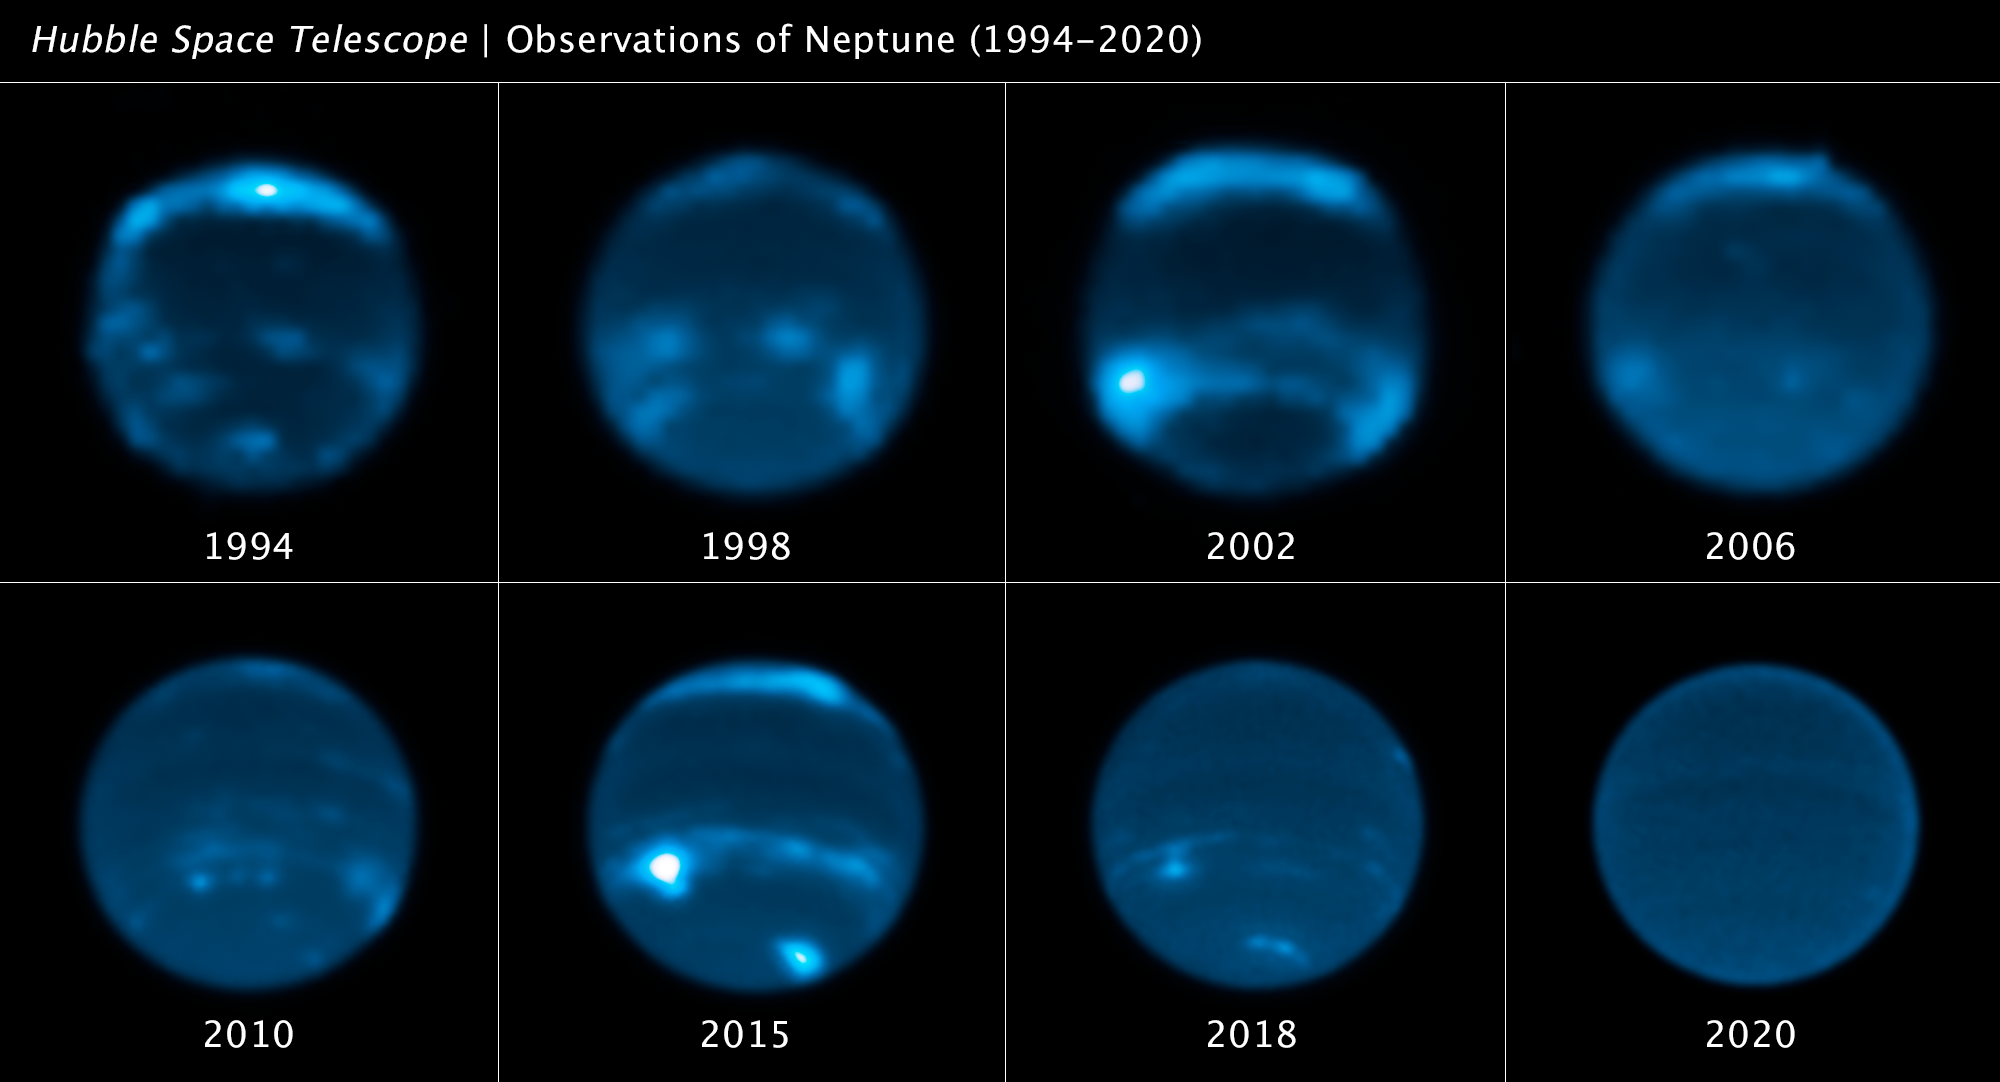

Neptune cloud cover over three decades

This sequence of NASA/ESA Hubble Space Telescope images chronicles the waxing and waning of the amount of cloud cover on Neptune. This long set of observations shows that the number of clouds grows increasingly following a peak in the solar cycle – where the Sun’s level of activity rhythmically rises and falls over an 11-year period.

The theory is that the increased ultraviolet radiation from the Sun, during its peak of activity, causes chemical changes deep in Neptune’s atmosphere. After a couple years this eventually percolates into the upper atmosphere to form clouds.

In 1989, NASA’s Voyager 2 spacecraft provided the first close-up images of linear, bright clouds, reminiscent of cirrus clouds on Earth, seen high in Neptune’s atmosphere. They form above most of the methane in Neptune’s atmosphere and consequently are not blue, but reflect all colours of sunlight. Hubble picks up where the brief Voyager flyby left off by continually keeping an eye on the planet yearly.

The findings are published in the journal Icarus.

Credit: NASA, ESA, E. Chavez (UC Berkeley), I. de Pater (UC Berkeley)